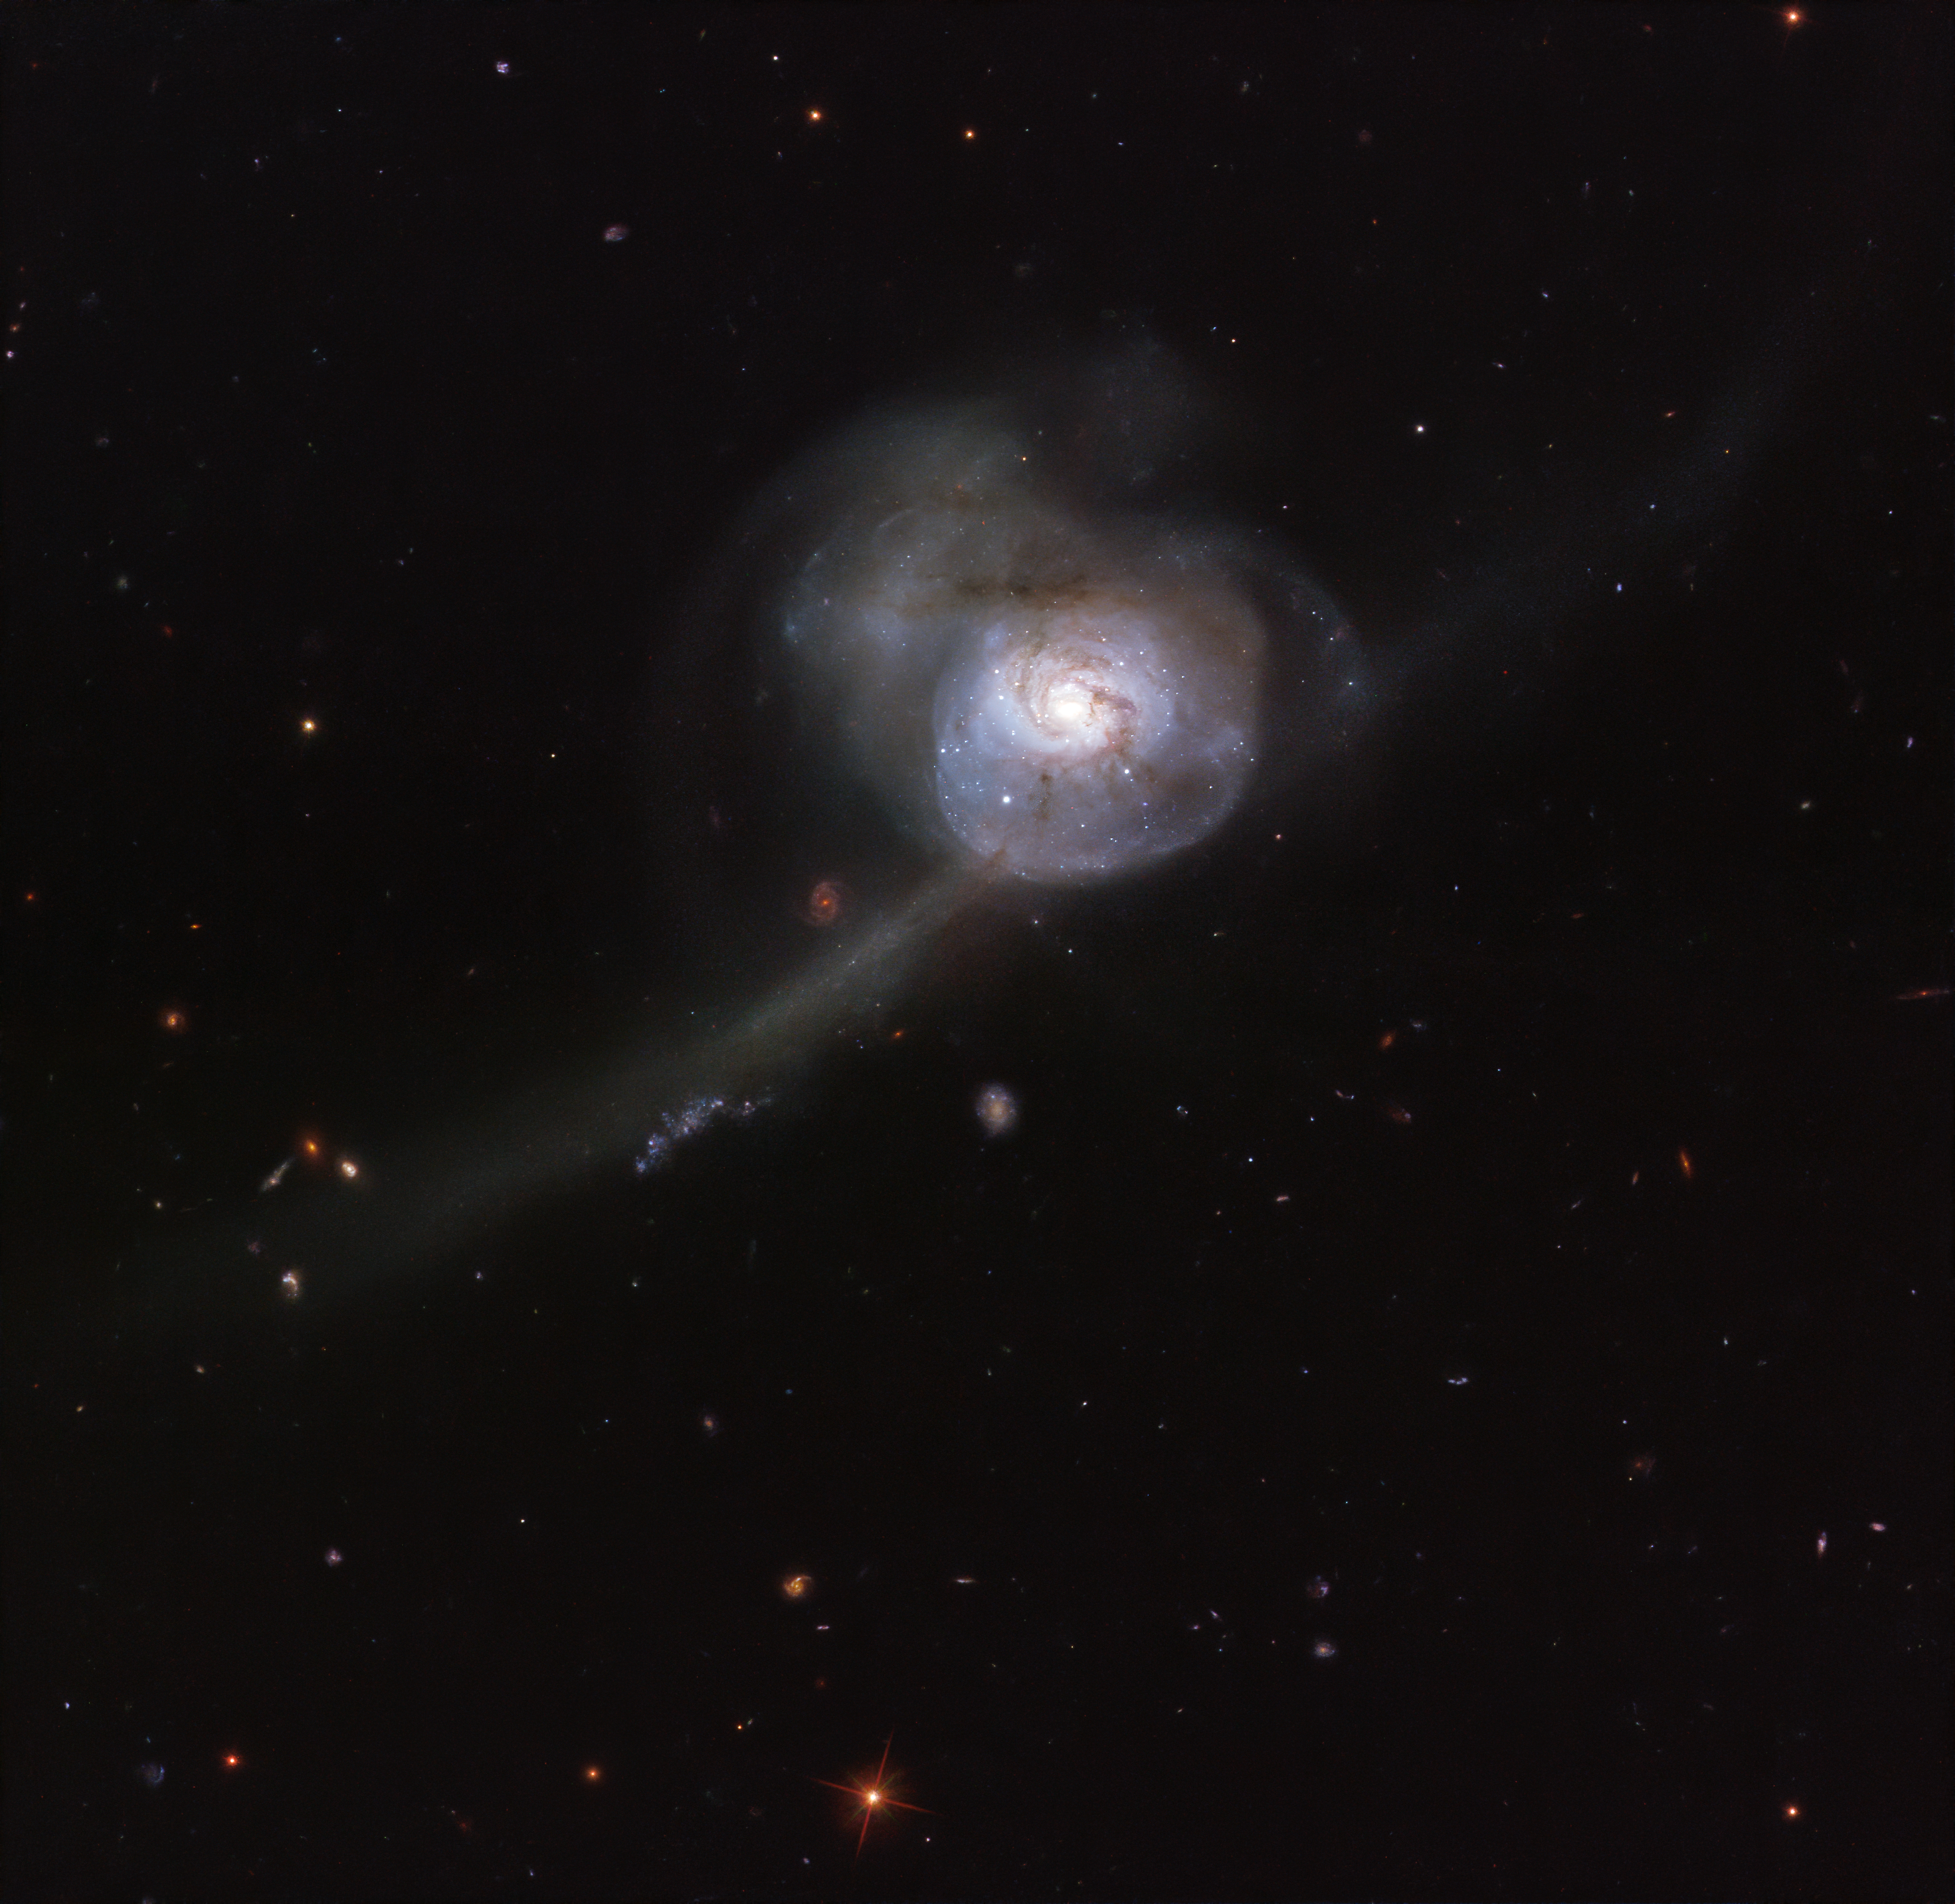

Beauty From Chaos

Appearing within the boundless darkness of space, the NASA/ESA Hubble Space Telescope’s snapshot of NGC 34 looks more like an otherworldly, bioluminescent creature from the deep oceans than a galaxy. Lying in the constellation Cetus (The Sea Monster), the galaxy’s outer region appears almost translucent, pinpricked with stars and strange wispy tendrils.

The main cause for this galaxy’s odd appearance lies in its past. If we were able to reverse time by a few million years, we would see two beautiful spiral galaxies on a direct collision course. When these galaxies collided into one another, their intricate patterns and spiral arms were permanently disturbed. This image shows the galaxy's bright centre, a result of this merging event that has created a burst of new star formation and lit up the surrounding gas. As the galaxies continue to intertwine and become one, NGC 34’s shape will become more like that of an peculiar galaxy, devoid of any distinct shape.

In the vastness of space, collisions between galaxies are quite rare events, but they can be numerous in mega-clusters containing hundreds or even thousands of galaxies.

Credit: ESA/Hubble & NASA, A. Adamo et al.